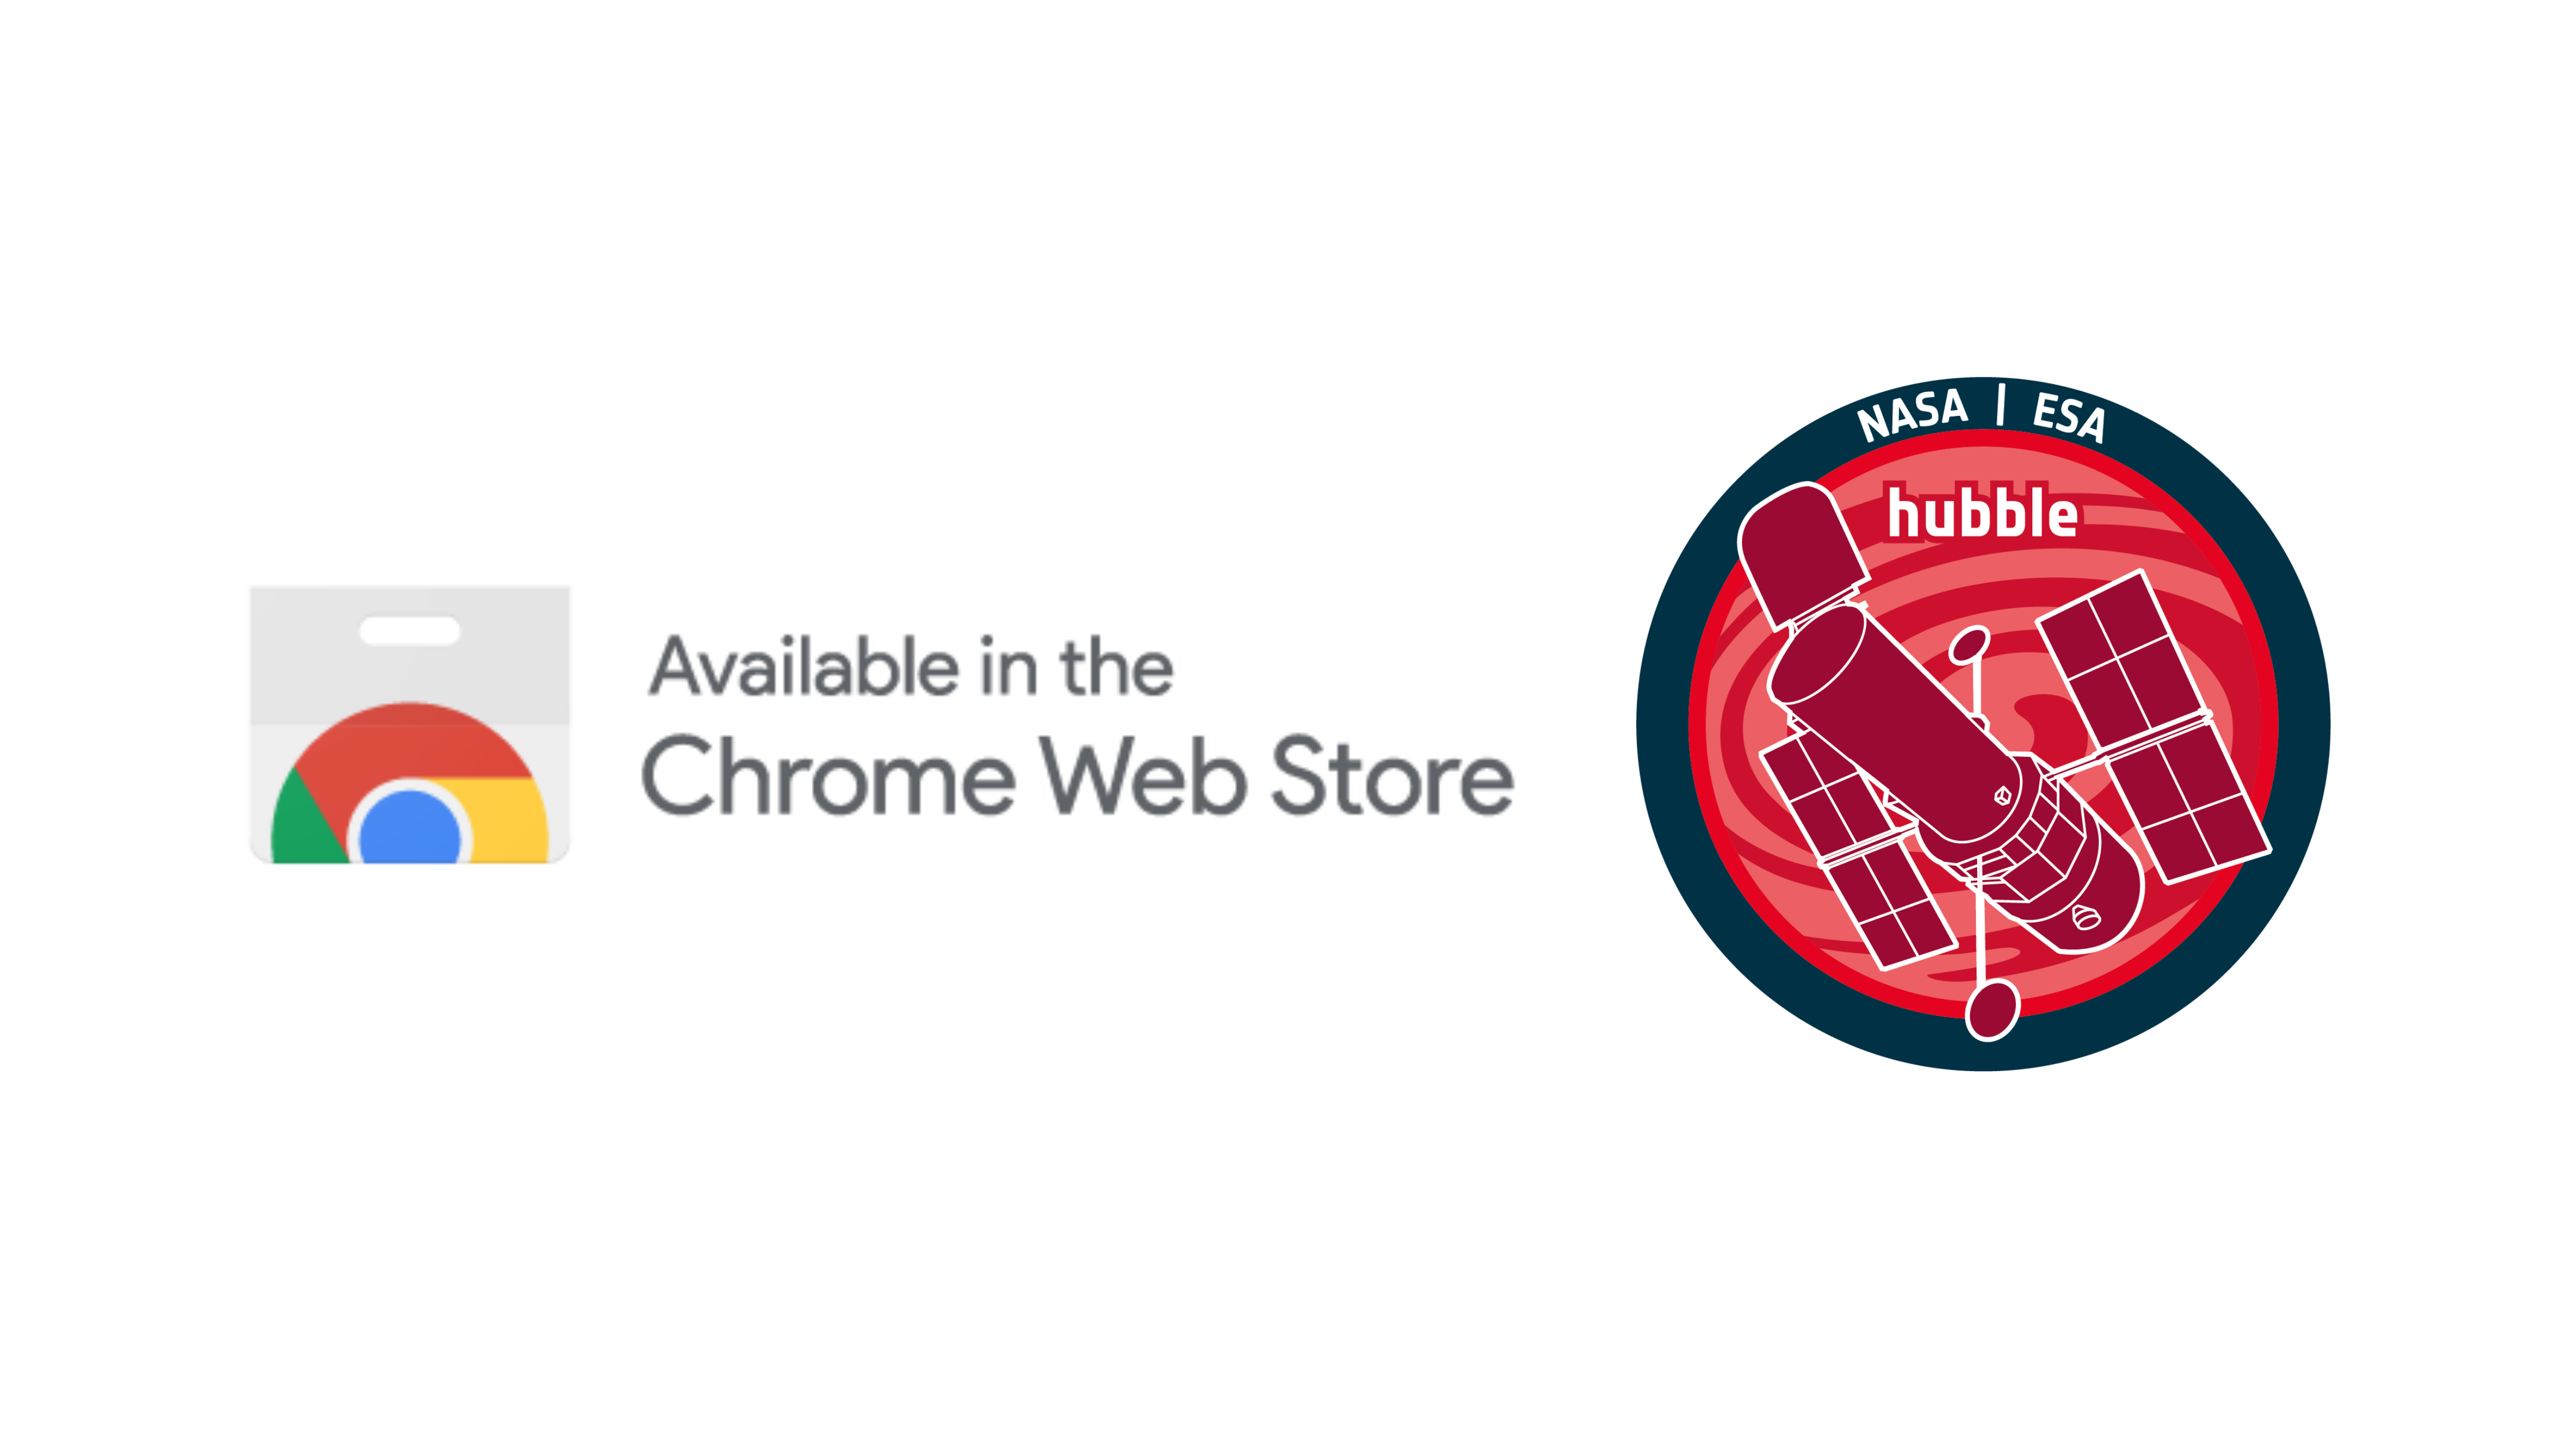

Announcement of the ESA/Hubble Chrome Browser Plugin Application

ESA/Hubble has developed a special Chrome browser application to allow users to enjoy the Top 100 Images collection while browsing the internet. It is now available on the Chrome Web Store.

Credit: ESA/Hubble